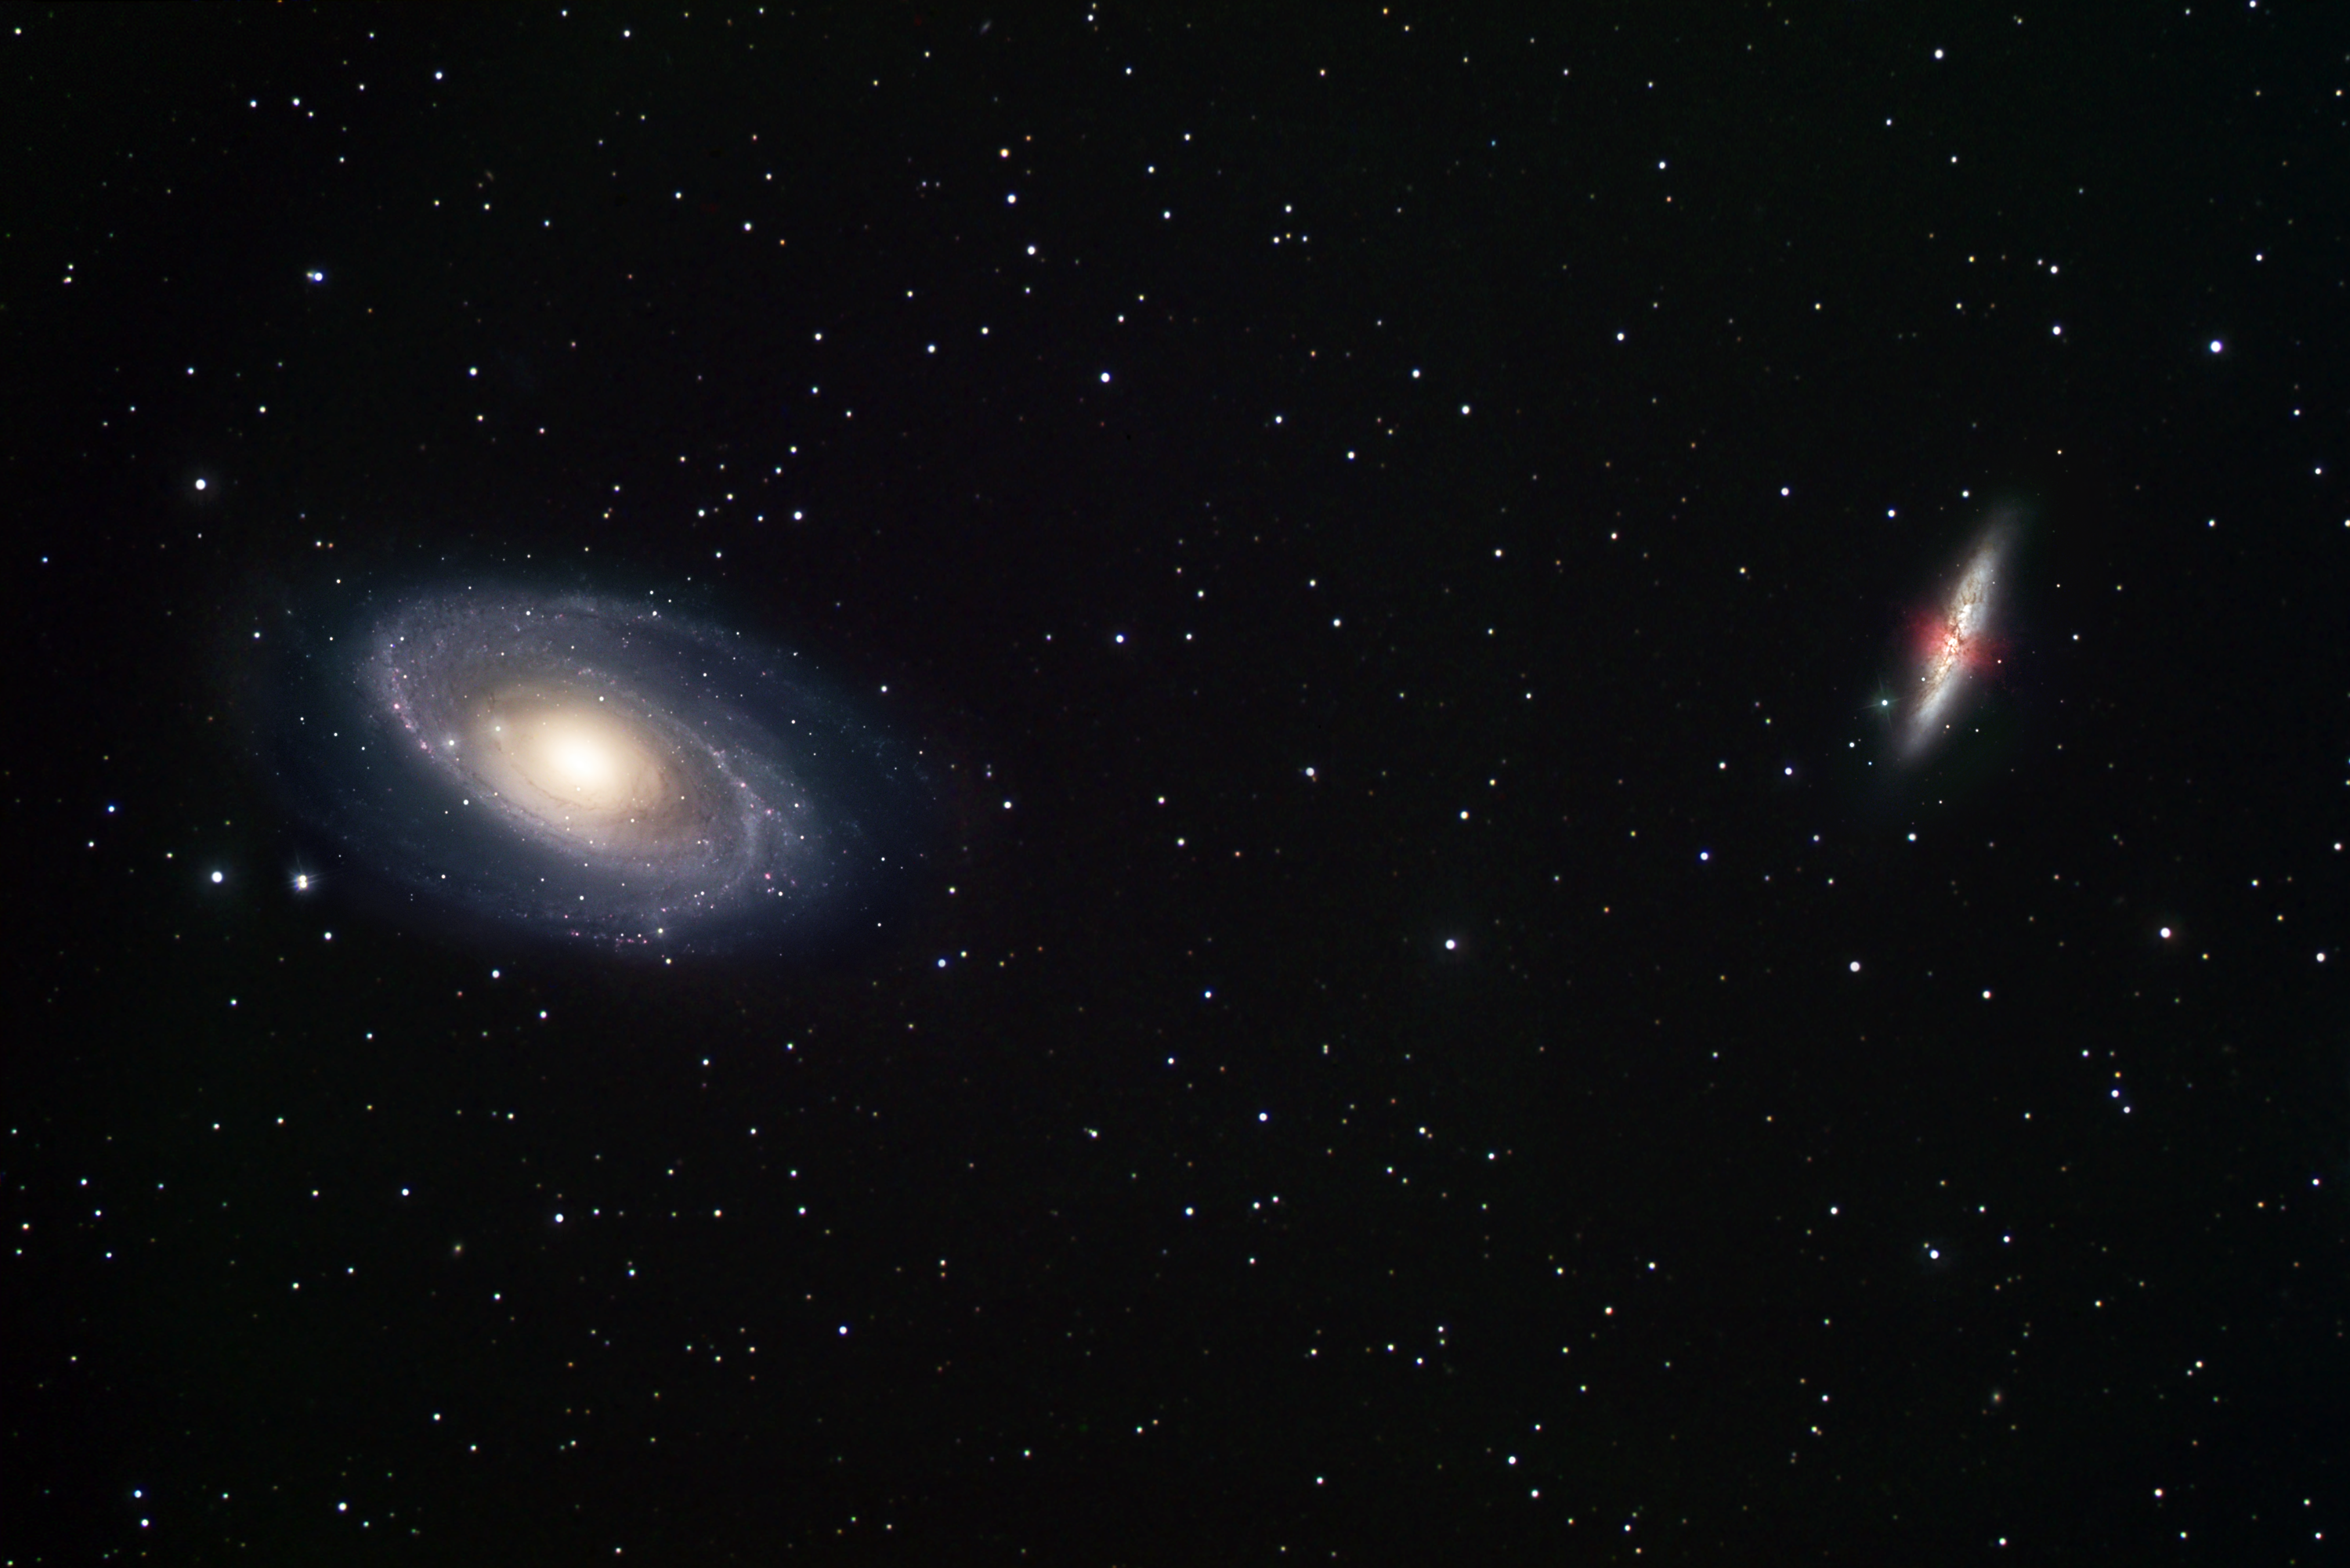

Ground-based view of two galaxy neighbours: M81 and M82

This ground-based image of M81 (left) and M82 (right) was taken by Robert Gendler with a 12 inch telescope from a suburb outside Hartford, Connecticut. The distance between the two popular galaxies is 37 arc-minutes (approximately a moon diameter). Credit: Robert Gendler

Credit: Robert Gendler